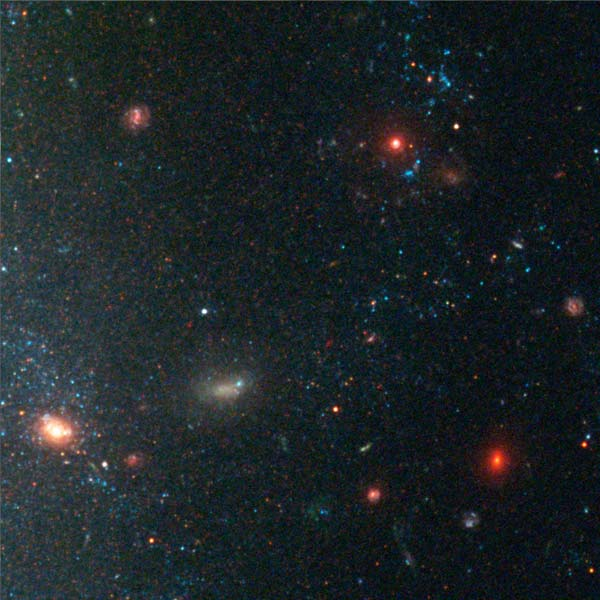

Details from ACS Image of NGC 3370: Edge of Galaxy (Region 2)

A region on the edge of the galaxy shows bright blue clusters of young, massive stars as well as distant, red background galaxies shining through.

Credit: NASA/ESA, The Hubble Heritage Team and A. Riess (STScI)